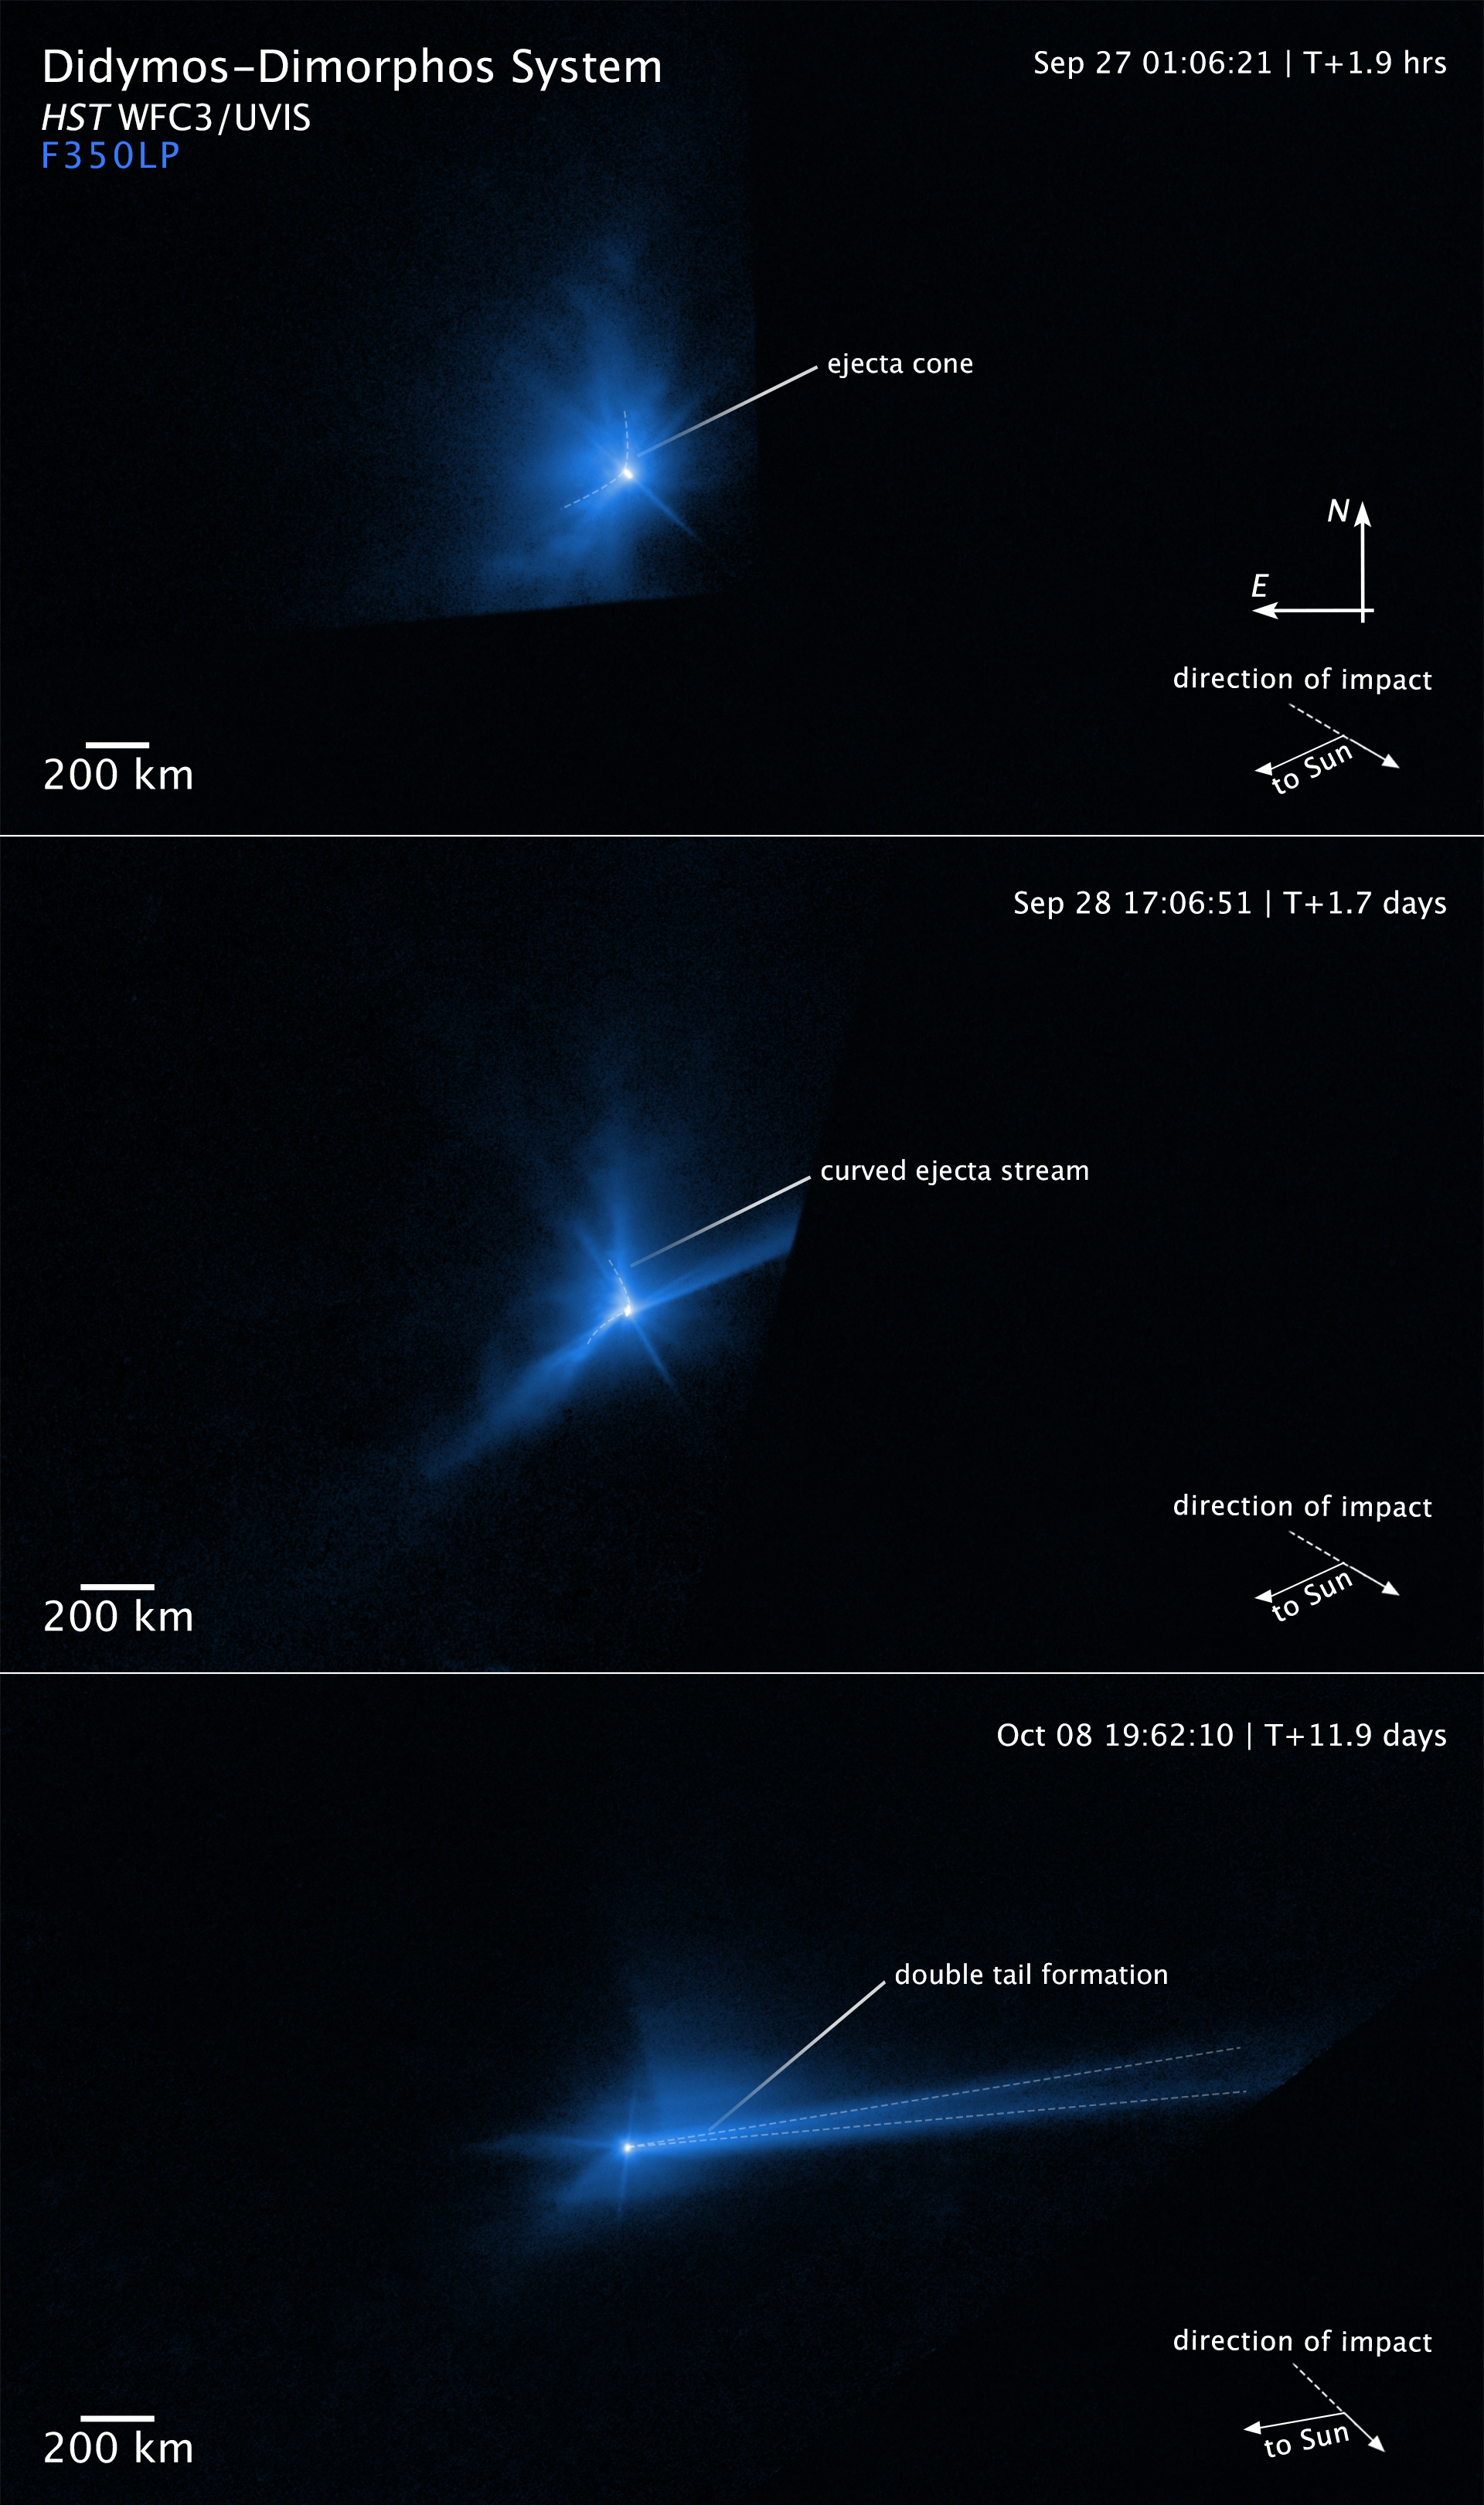

Hubble captures DART asteroid impact debris (annotated 2)

These three panels capture the breakup of the asteroid Dimorphos when it was deliberately hit by NASA’s 545-kilogram Double Asteroid Redirection Test (DART) mission spacecraft on 26 September 2022. The NASA/ESA Hubble Space Telescope had a ringside view of the space demolition derby. The top panel, taken 2 hours after impact, shows an ejecta cone of an estimated 900,000 kilograms of dust.

The centre frame shows the dynamic interaction within the asteroid’s binary system that starts to distort the cone shape of the ejecta pattern about 17 hours after the impact. The most prominent structures are rotating, pinwheel-shaped features. The pinwheel is tied to the gravitational pull of the companion asteroid, Didymos.

In the bottom frame Hubble next captures the debris being swept back into a comet-like tail by the pressure of sunlight on the tiny dust particles. This stretches out into a debris train where the lightest particles travel the fastest and farthest from the asteroid. The mystery is compounded when Hubble records the tail splitting in two for a few days.

Credit: NASA, ESA, STScI, J. Li (PSI)